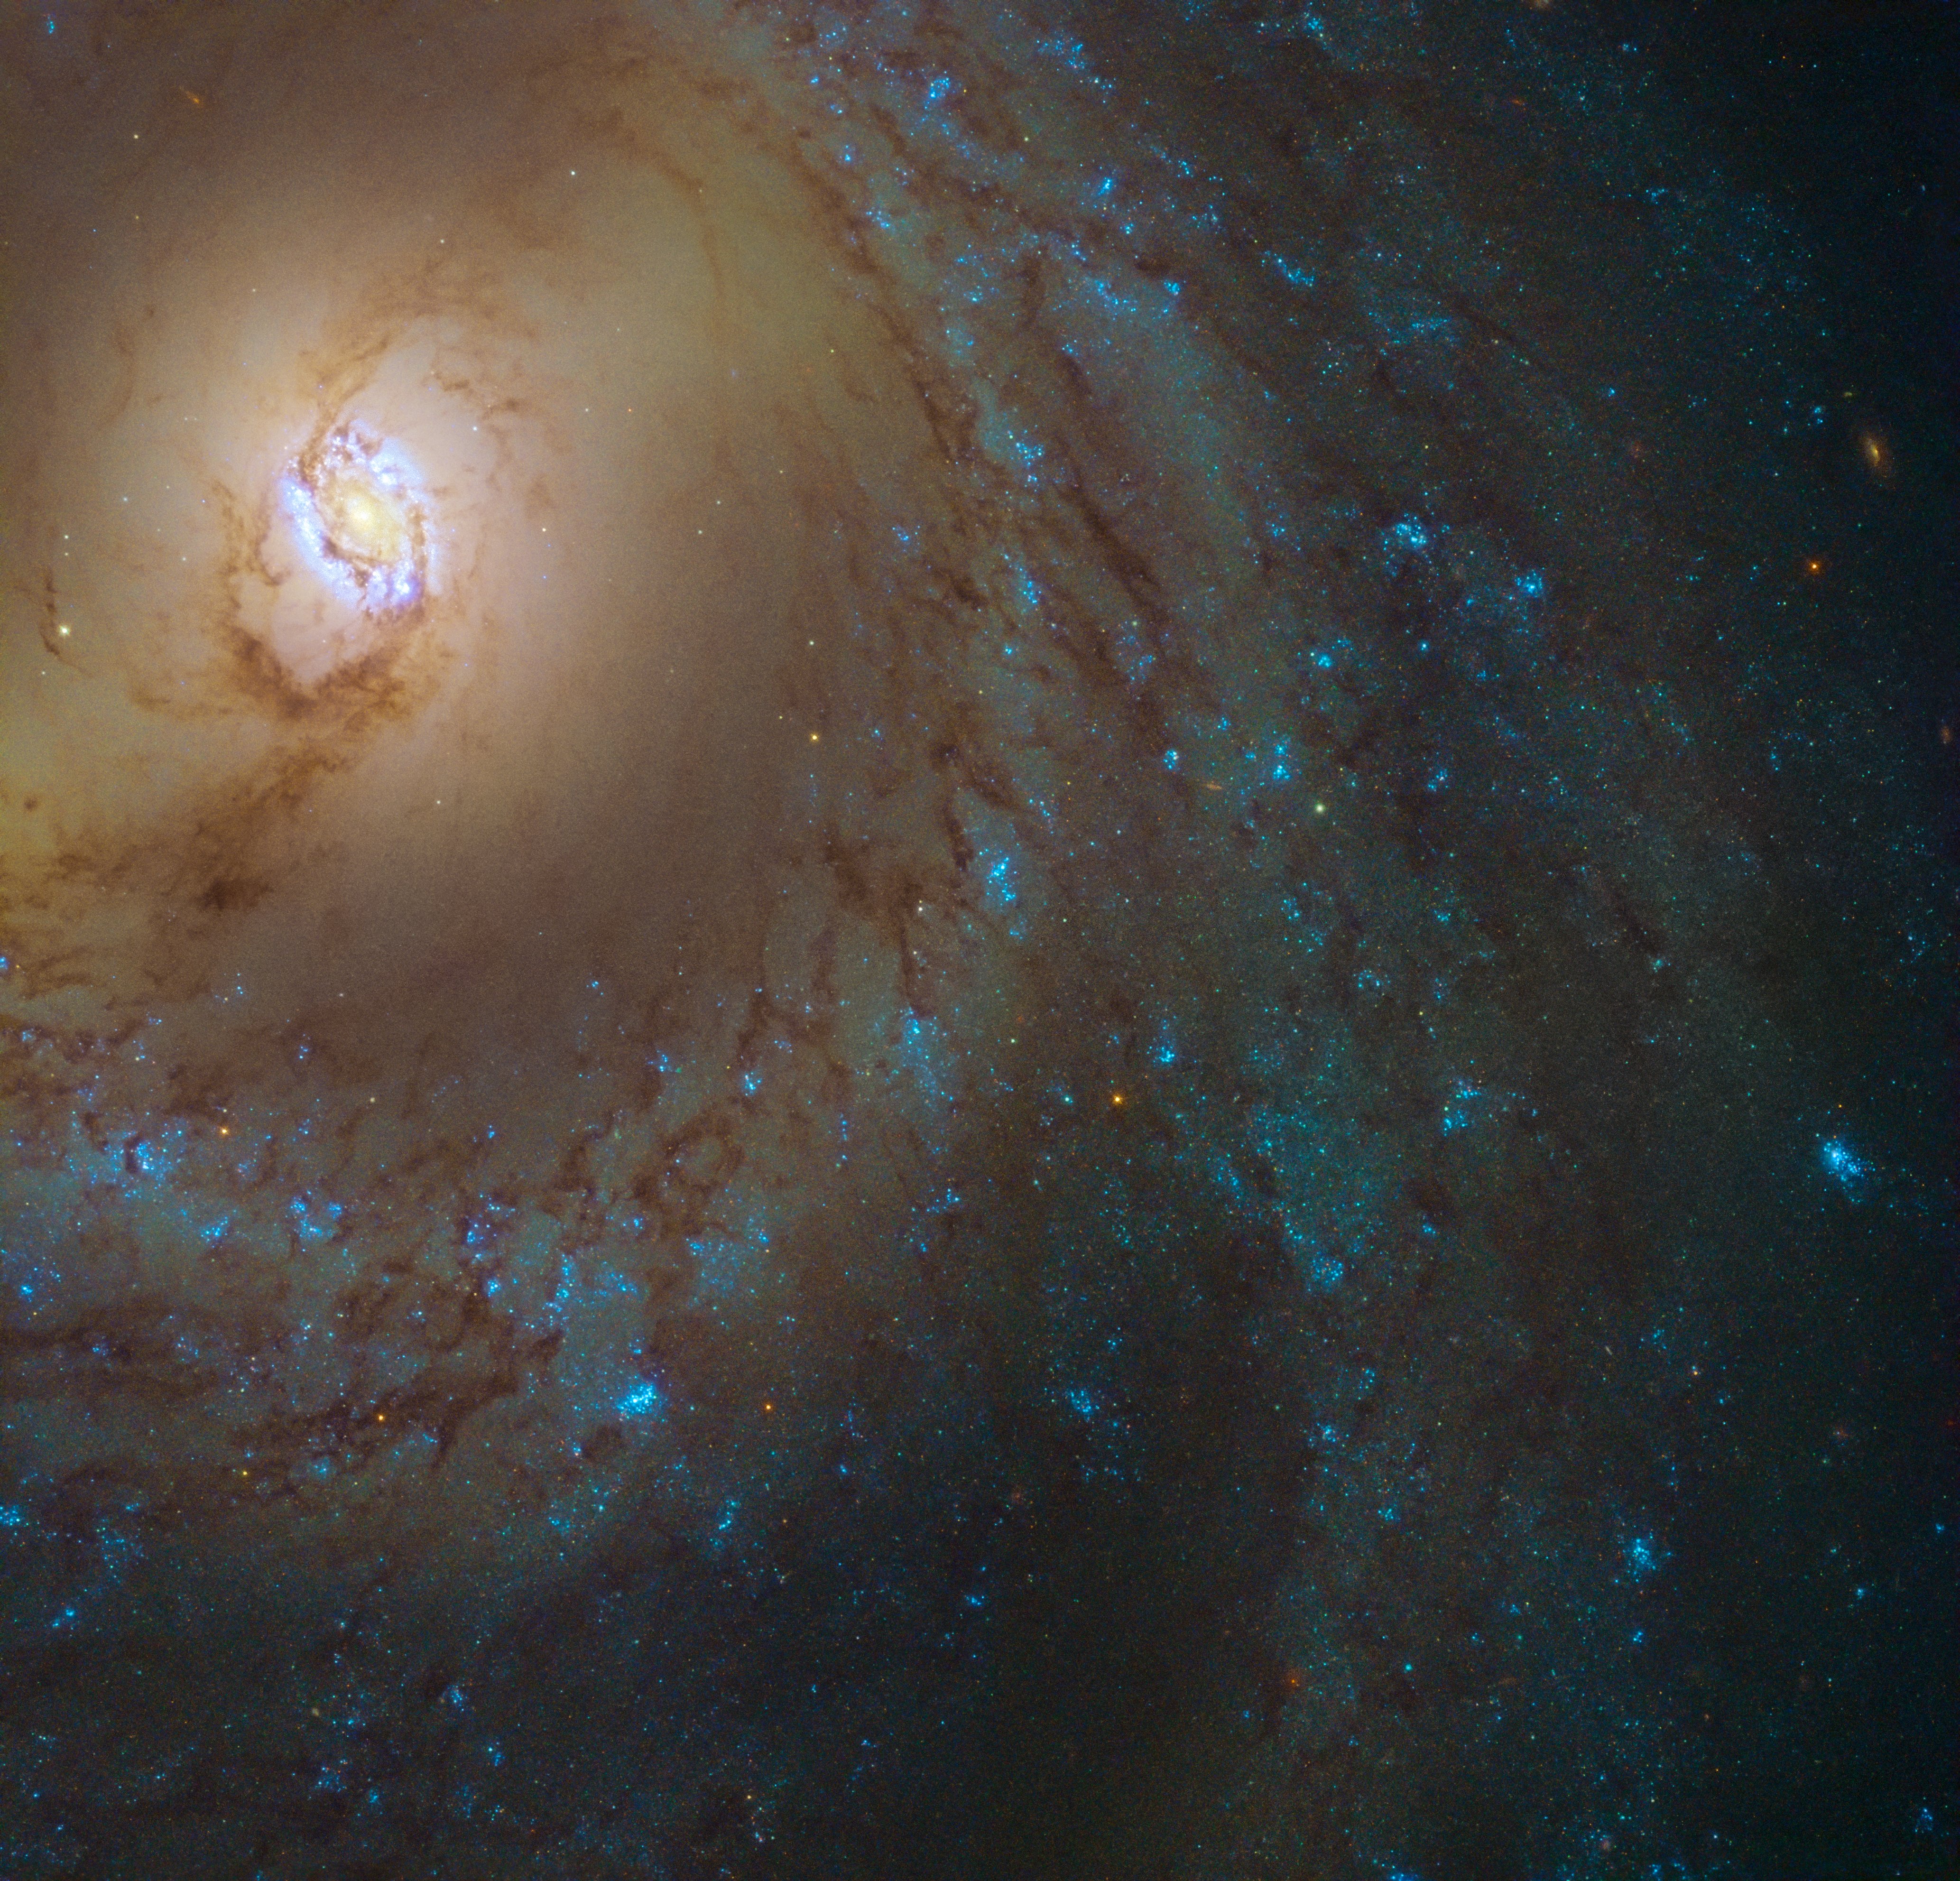

Rings upon rings

This image from the NASA/ESA Hubble Space Telescope reveals a spiral galaxy named Messier 95 (also known as M95 or NGC 3351). Located about 35 million light-years away in the constellation of Leo (The Lion), this swirling spiral was discovered by astronomer Pierre Méchain in 1781, and catalogued by French astronomer Charles Messier just four days later. Messier was primarily a comet hunter, and was often left frustrated by objects in the sky that resembled comets but turned out not to be. To help other astronomers avoid confusing these objects in the future, he created his famous catalogue of Messier objects.

Most definitely not a comet, Messier 95 is actually a barred spiral galaxy. The galaxy has a bar cutting through its centre, surrounded by an inner ring currently forming new stars. Also our own Milky Way is a barred spiral.

As well as hosting this stellar nursery, Messier 95 is a known host of the dramatic and explosive final stages in the lives of massive stars: supernovae. In March 2016 a spectacular supernova named SN 2012aw was observed in the outer regions of one of Messier 95’s spiral arms. Once the light from the supernova had faded, astronomers were able to compare observations of the region before and after the explosion to find out which star had “disappeared” — the progenitor star. In this case, the star was an especially huge red supergiant up to 26 times more massive than the Sun.

Credit: ESA/Hubble & NASA